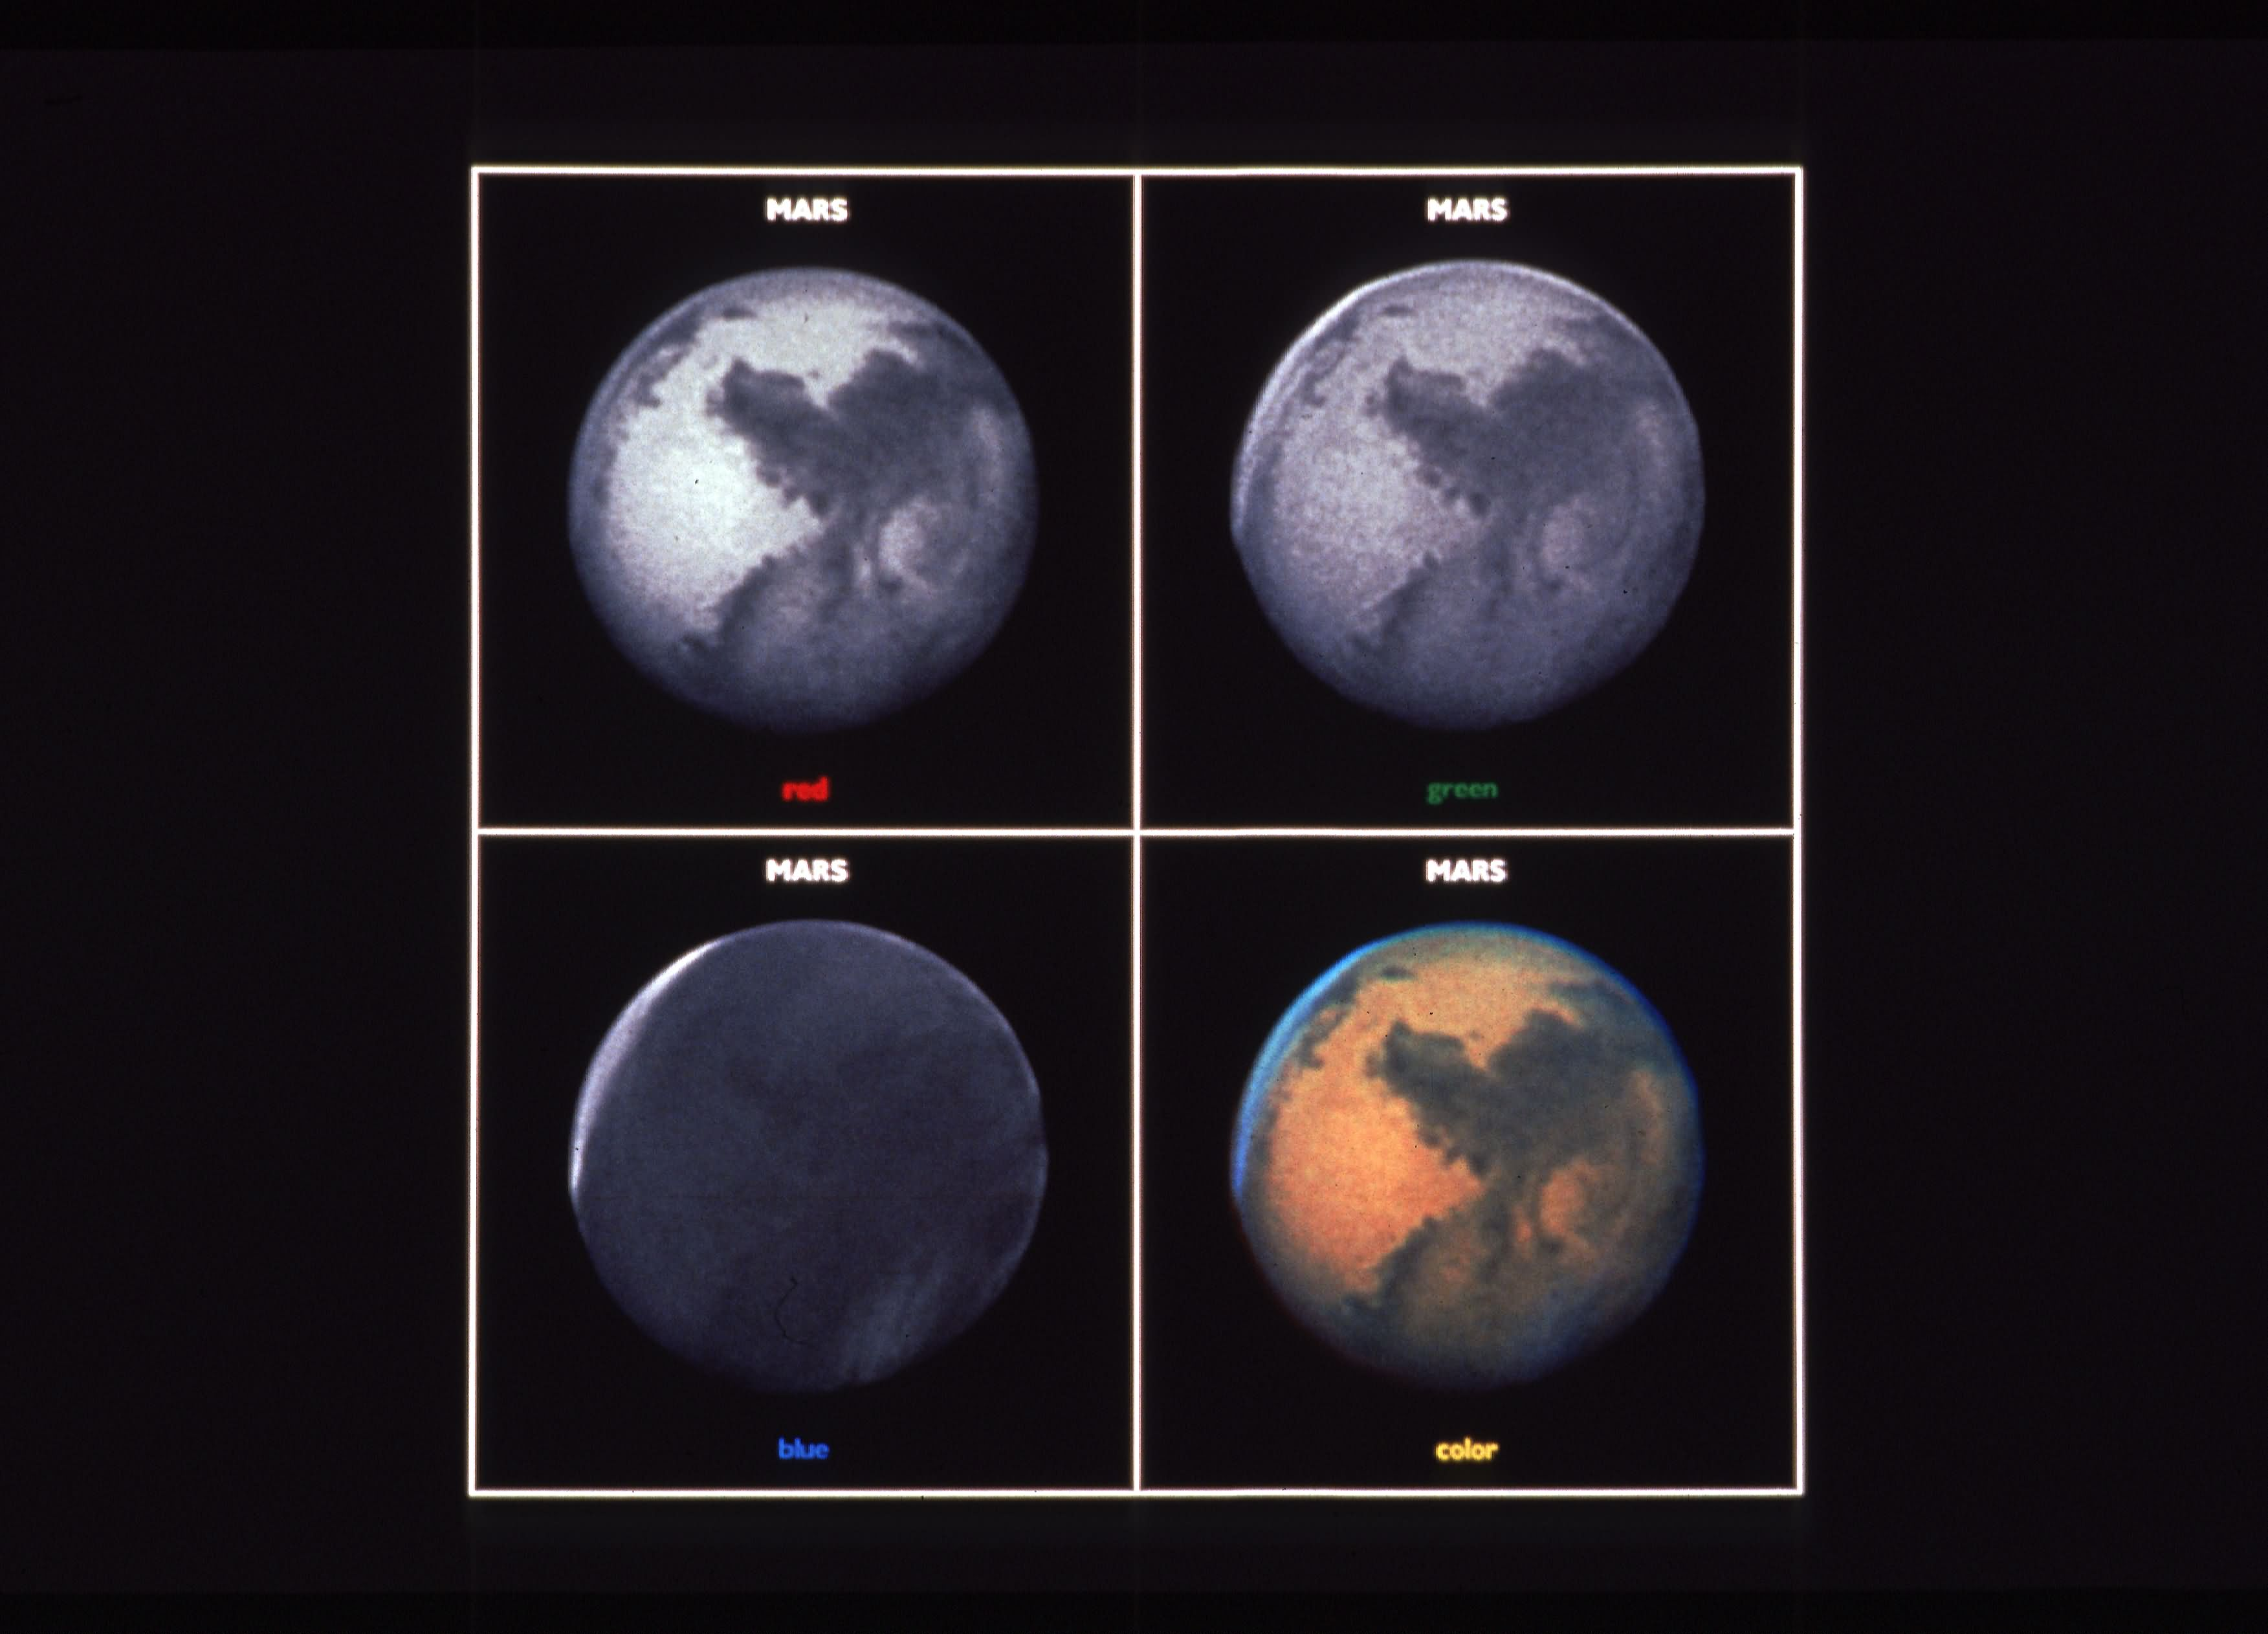

Mars, three-color composite

Exposures taken through separate red, green, and blue filters and used to create a colour image of Mars (lower right). The red filter shows the best surface detail. Because Mars' atmosphere scatters blue light (much like as on Earth) martian surface detail is obscured in the blue filter exposure. The blue filter exposure does allow for clouds to be easily seen. A polar hood of clouds over Mars' north pole is evident, and a thin sheet of morning clouds is evident on the western limb (bottom).

Credit: P. James / University of Toledo